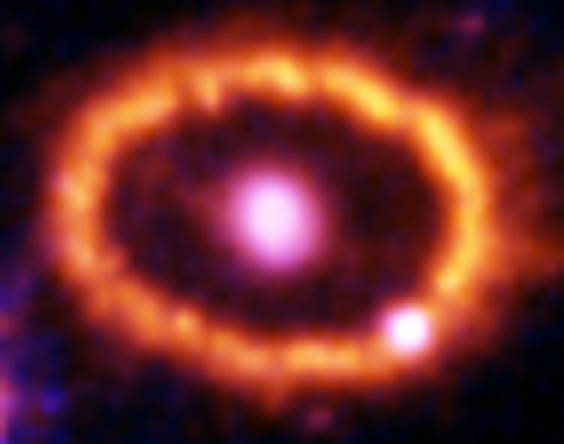

Hubble Supernova 1987A Scrapbook (1994-2003) - Image 3

in 1987, astronomers spotted the brightest stellar explosion ever seen since the one observed by Johannes Kepler over 400 years ago. Called SN 1987A, the titanic supernova explosion blazed with the power of 100,000,000 suns for several months following its discovery on Feb. 23 of that year. Although the supernova itself is over a million times fainter than when it was first discovered, a new light show in the space surrounding it is just beginning.

Credit: NASA/ESA, P. Challis, R. Kirshner (Harvard-Smithsonian Center for Astrophysics) and B. Sugerman (STScI)